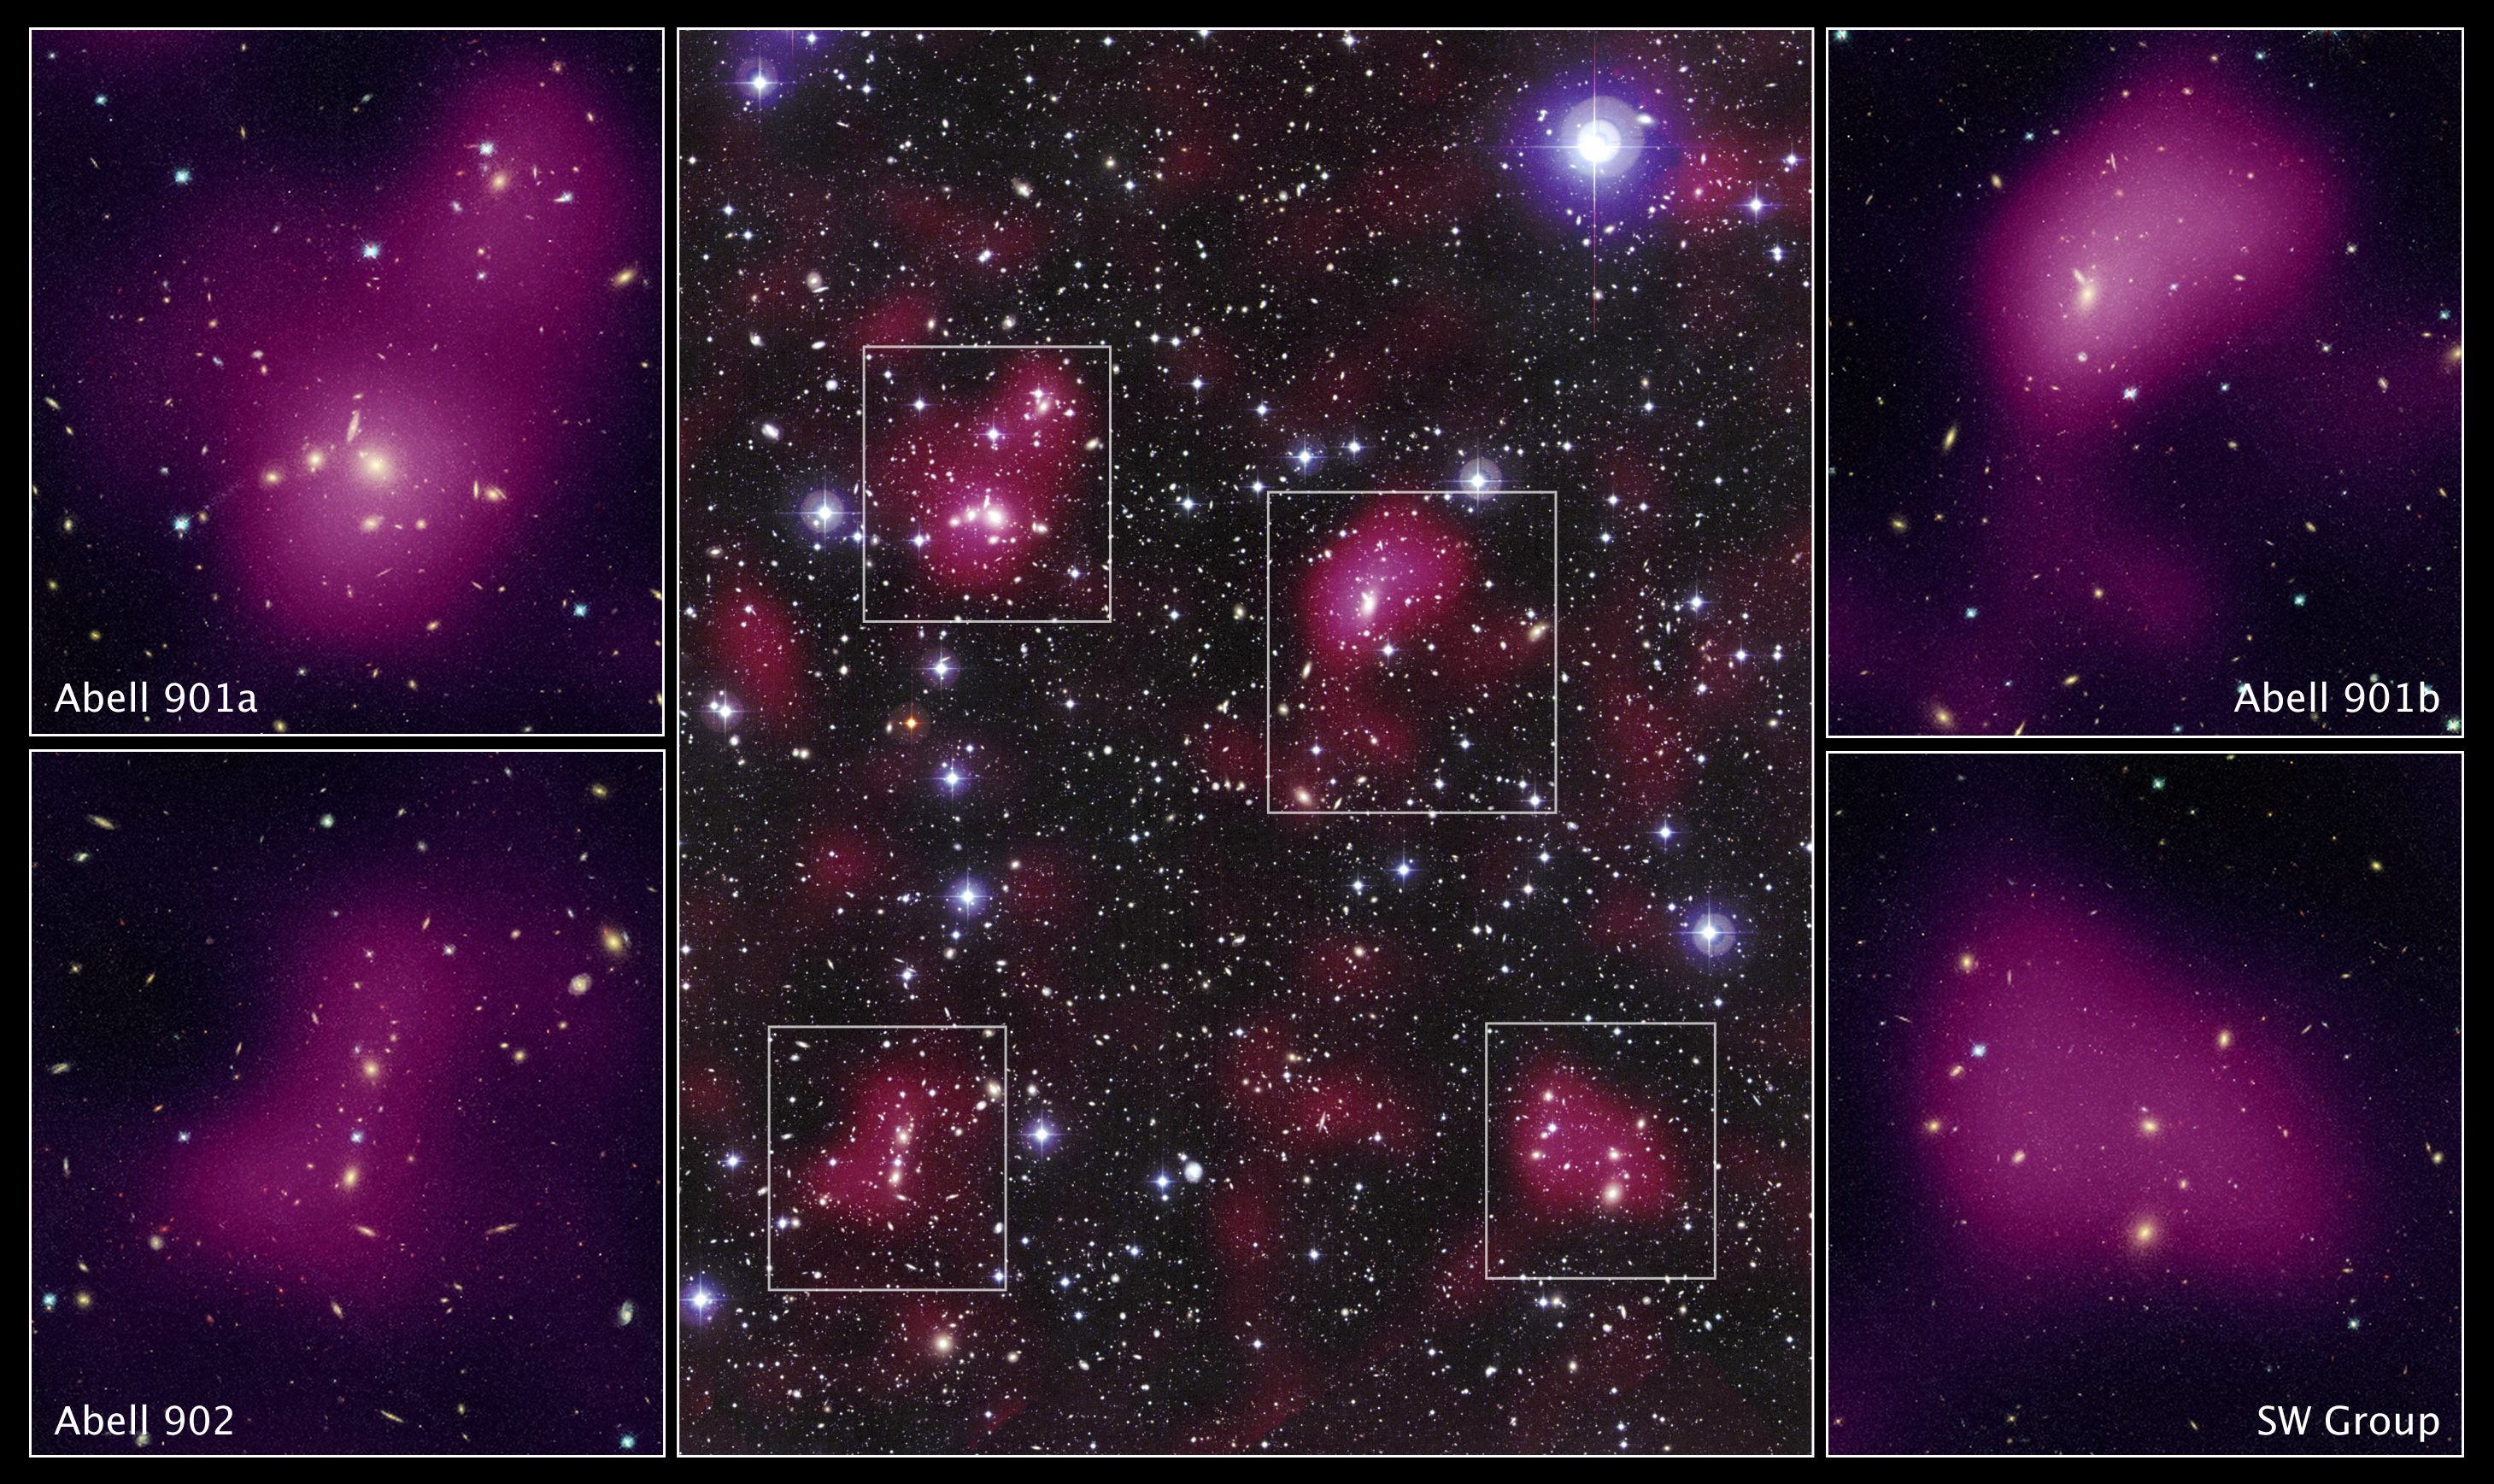

Hubble maps dark matter web in a large galaxy cluster

These images reveal the distribution of dark matter in the supercluster Abell 901/902, composed of hundreds of galaxies.

The image in the center shows the entire supercluster. Astronomers assembled this photo by combining a visible-light image of the supercluster taken with the MPG/ESO 2.2-meter telescope in La Silla, Chile, with a dark matter map derived from observations with the NASA/ESA Hubble Space Telescope.

The magenta-tinted clumps represent a map of the dark matter in the cluster. Dark matter is an invisible form of matter that accounts for most of the Universe's mass. The image shows that the supercluster galaxies lie within the clumps of dark matter.

Hubble cannot see the dark matter directly. Astronomers inferred its location by analyzing the effect of so-called weak gravitational lensing, where light from more than 60,000 galaxies behind Abell 901/902 is distorted by intervening matter within the cluster. Researchers used the observed, subtle distortion of the galaxies' shapes to reconstruct the dark matter distribution in the supercluster.

The image was assembled by combining a visible-light image of the supercluster with a map of the dark matter distribution.

The Hubble study pinpointed four main areas in the supercluster where dark matter has pooled into dense clumps. These areas match the location of hundreds of galaxies that have experienced a violent history in their passage from the outskirts of the supercluster into these dense regions. The four close-up images flanking the central photo are Hubble views of the four dense clumps of matter. To make this image, astronomers superimposed the dark matter map over a Hubble visible-light image of the supercluster galaxies.

The images are part of the Space Telescope Abell 901/902 Galaxy Evolution Survey (STAGES), which covers one of the largest patches of sky ever observed by the Hubble telescope. The area surveyed is so wide that it took 80 Hubble images to cover the entire field.

Hubble's Advanced Camera for Surveys made the observations in June and July 2005 and in January 2006.

Credit for the Hubble images: NASA, ESA, C. Heymans (University of British Columbia, Vancouver), M. Gray (University of Nottingham, U.K.), M. Barden (Innsbruck), and the STAGES collaboration
Credit for the ground-based image: ESO, C. Wolf (Oxford University, U.K.), K. Meisenheimer (Max-Planck Institute for Astronomy, Heidelberg), and the COMBO-17 collaboration